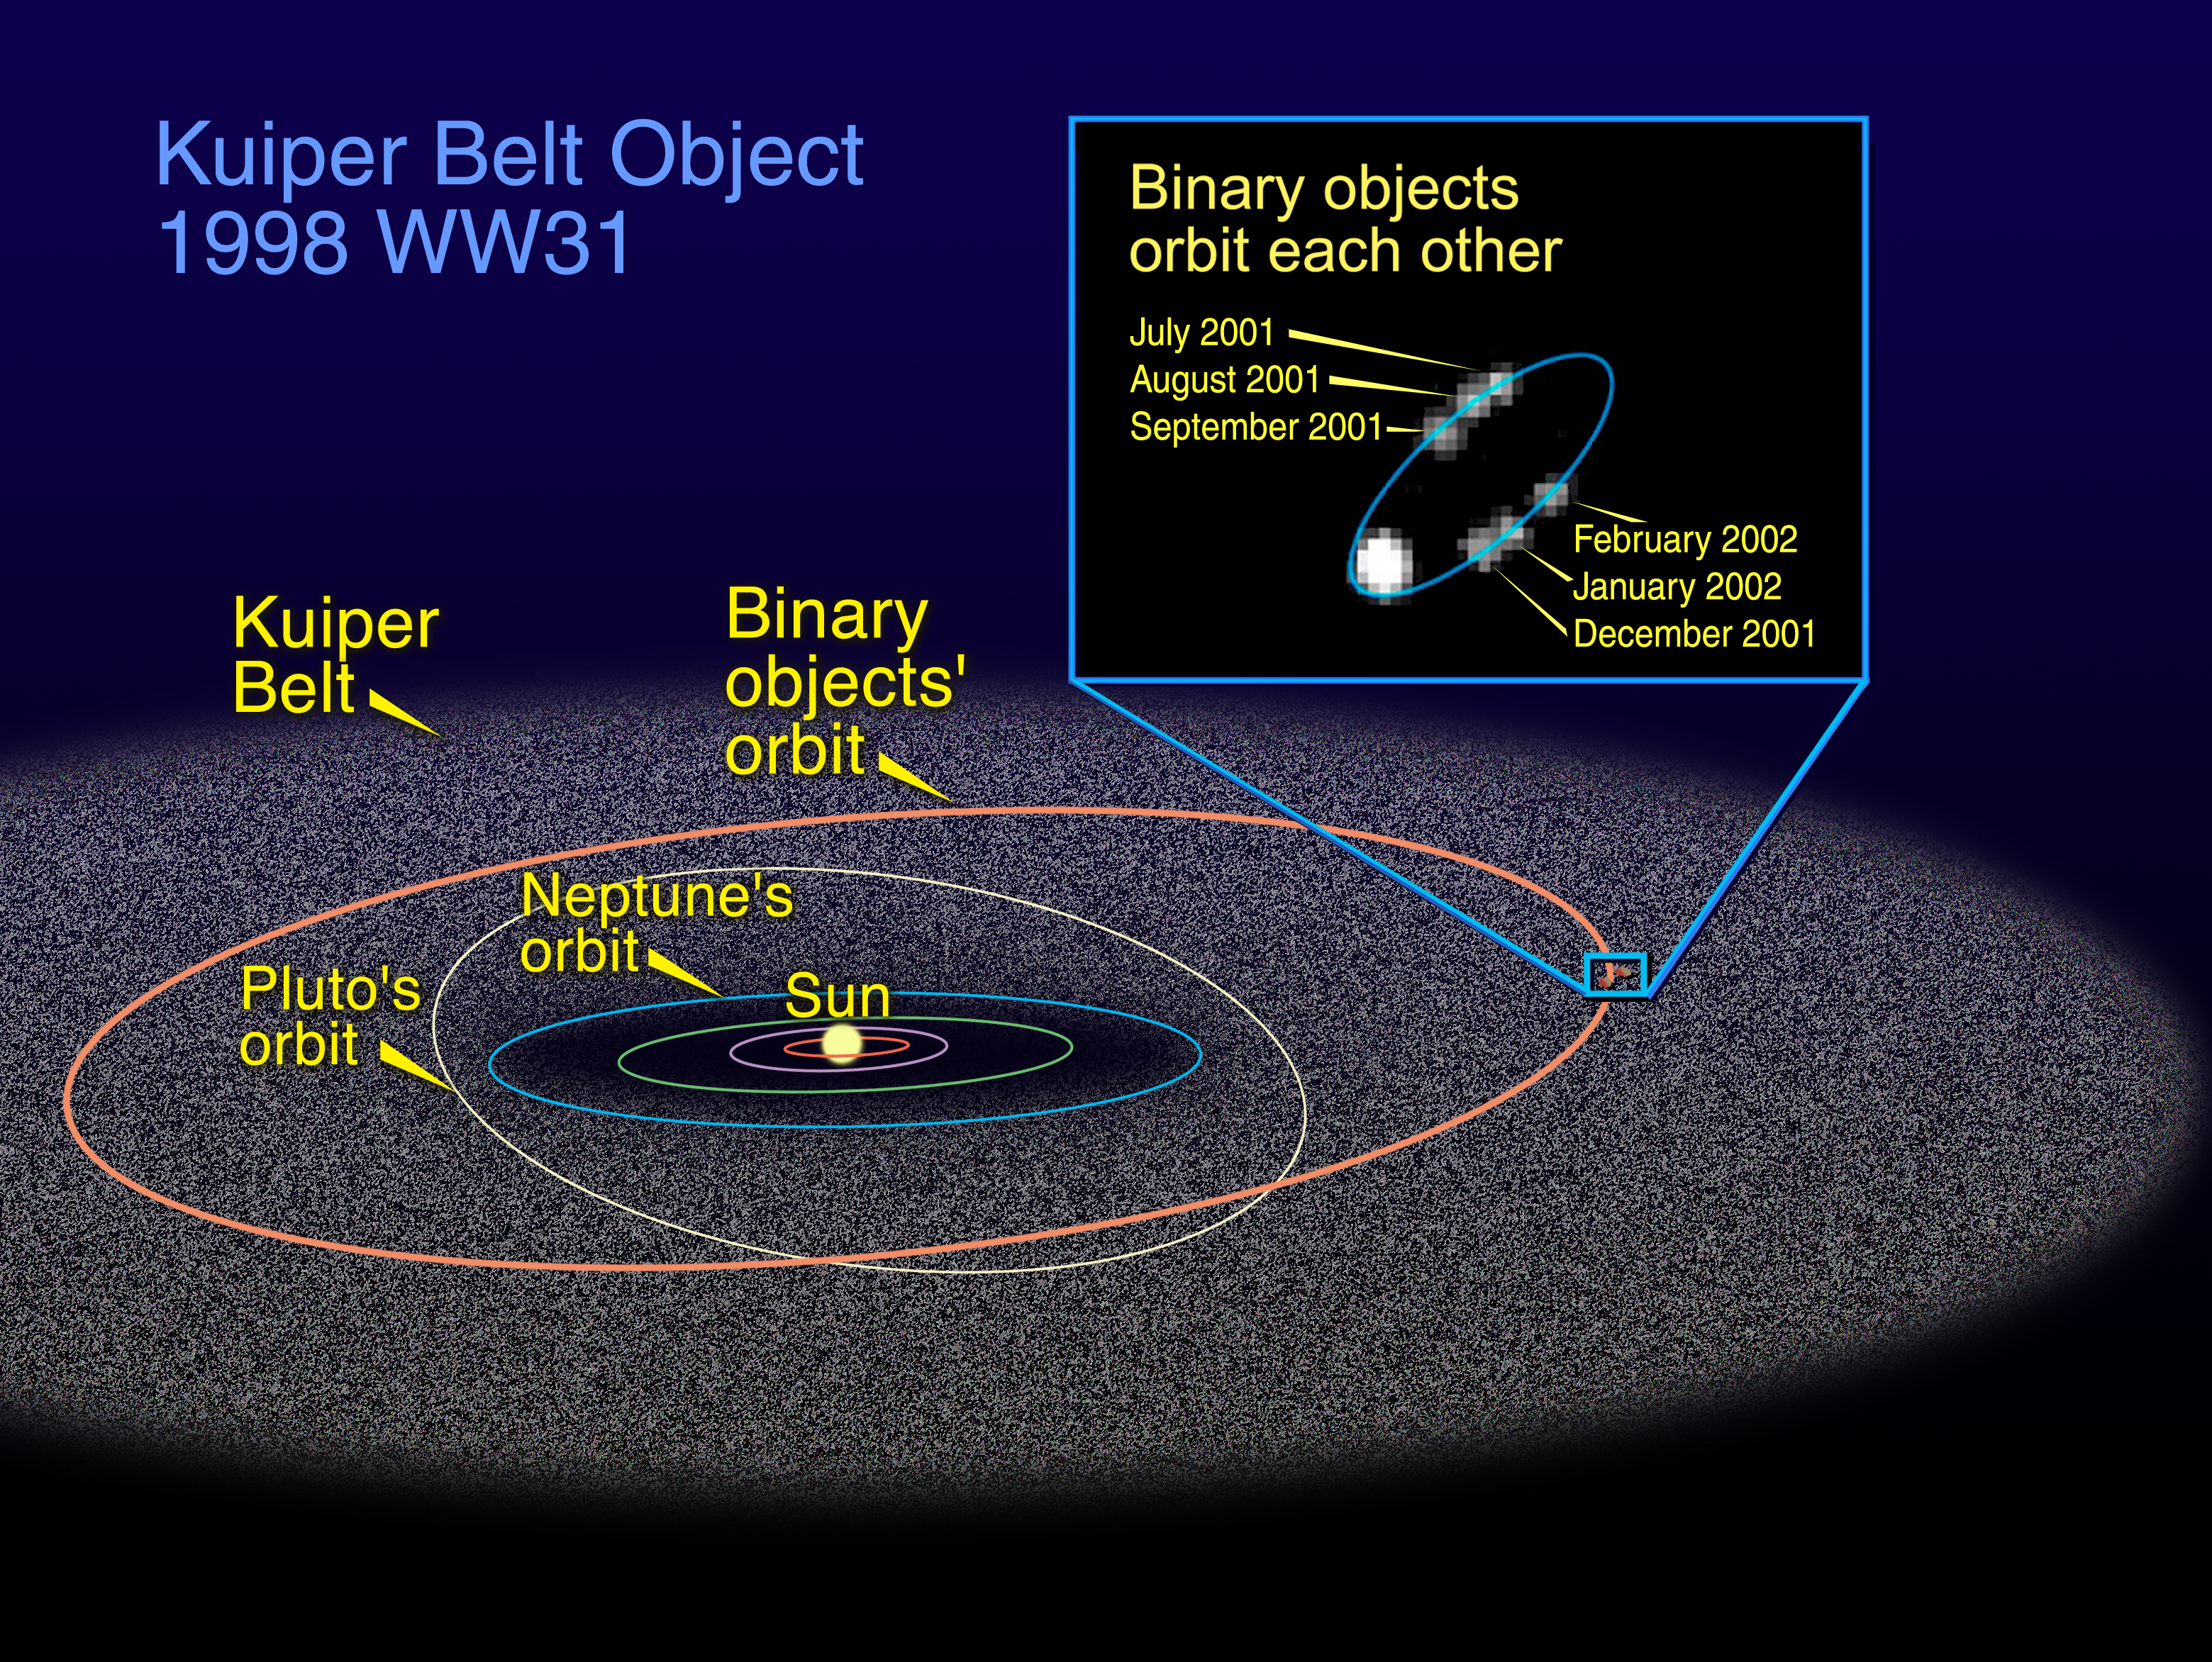

The Orbit of 1998 WW31 in the Kuiper Belt

This illustration compares the orbit of the binary Kuiper Belt object, called 1998 WW31, with the orbits of Pluto and Neptune, the outermost solar system planets. The inset picture, consisting of six snapshots taken by NASA/ESA Hubble Space Telescope, shows one member of the Kuiper Belt pair [the faint white blobs] during its elliptical orbit. The bright white object at the bottom of the oval is the other member of the pair.

Credit: NASA/ESA and A. Feild ( Space Telescope Science Institute)